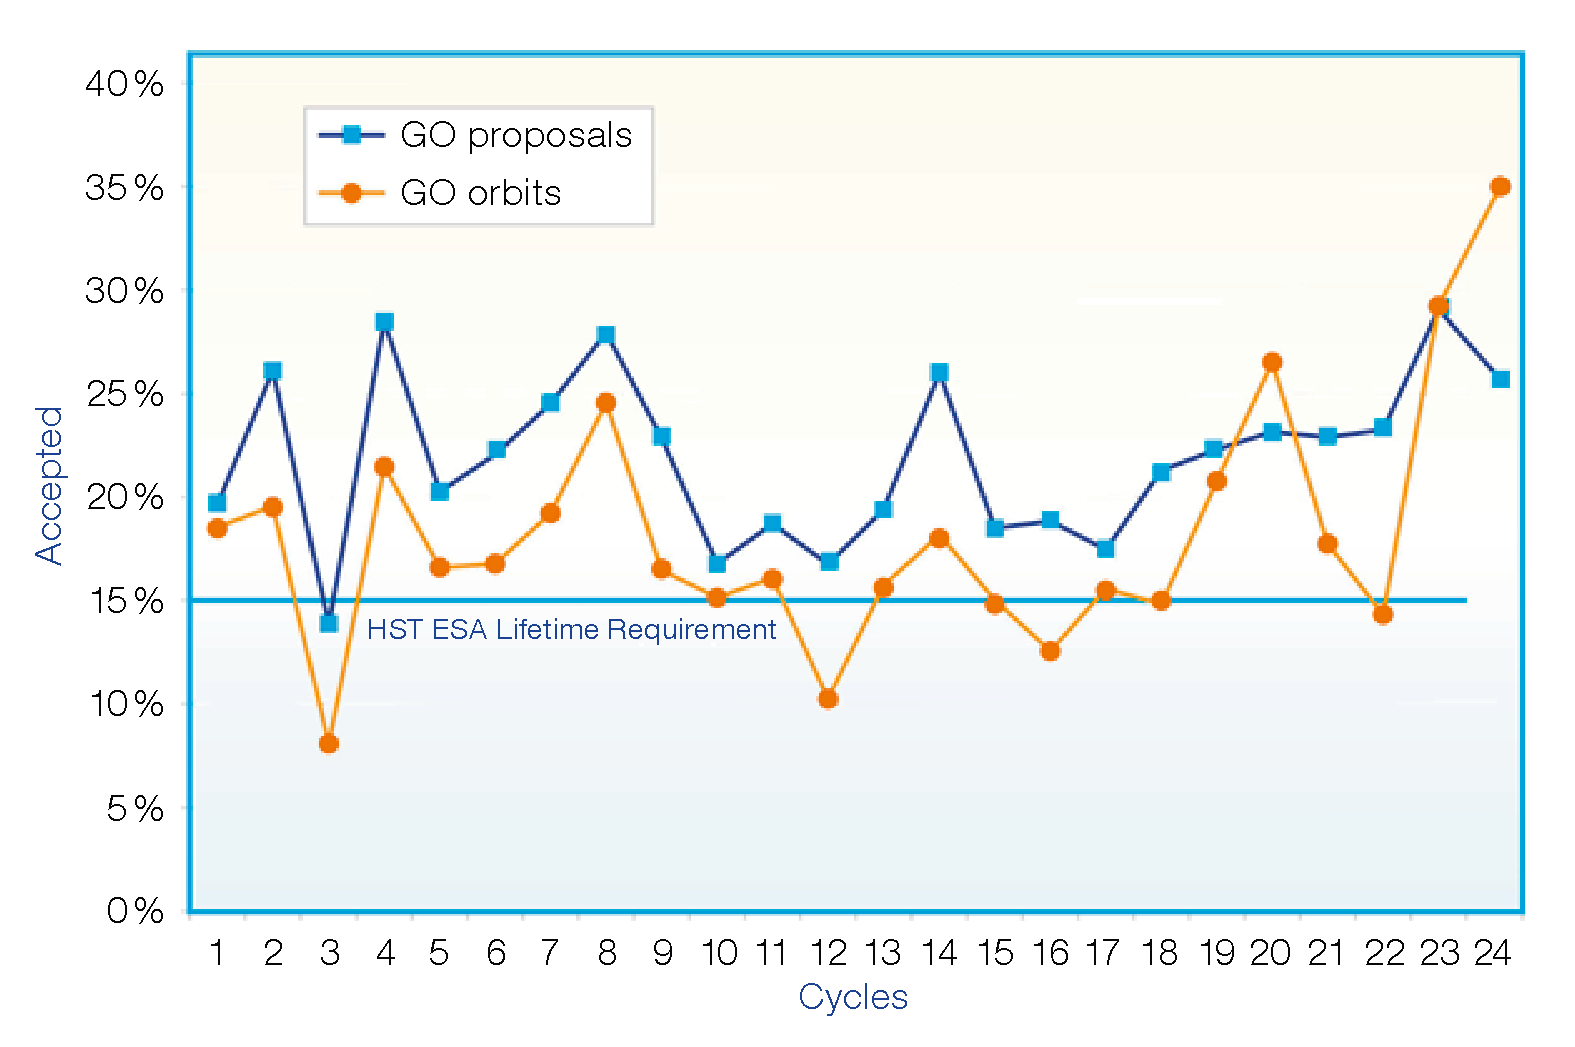

Time allocation results — Cycle 24

This figure shows the rate of success in receiving time on Hubble for PIs from ESA member states as a function of cycle, compared with the lifetime requirement of 15% over the duration of the mission, as described by the NASA/ESA Memorandum of Understanding.

Credit: ESA